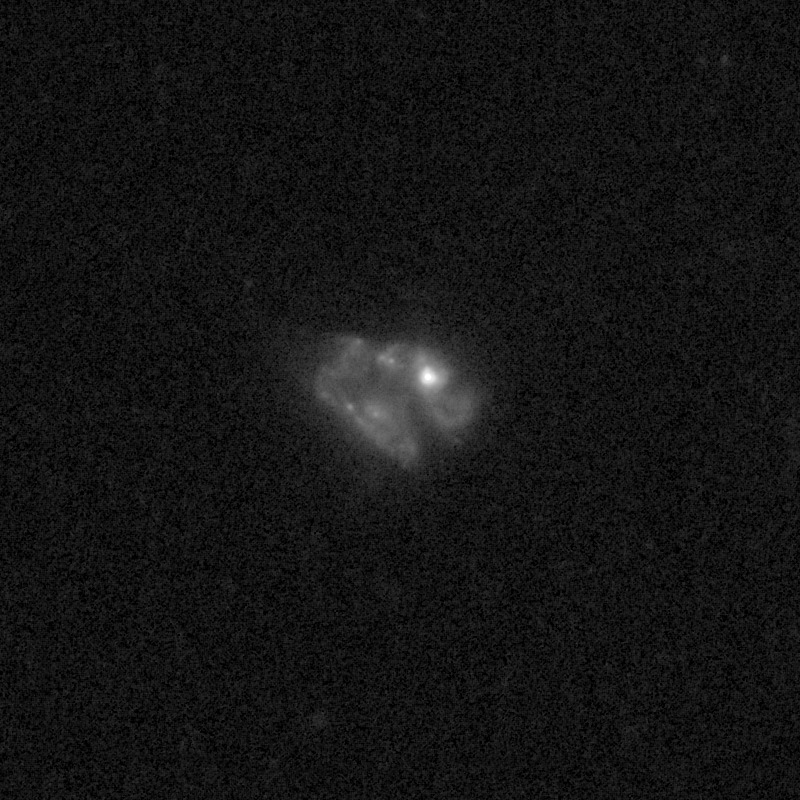

Outflows from merging galaxy J1558+3957

This NASA/ESA Hubble Space Telescope image of the galaxy J1558+3957 shows it is undergoing a firestorm of star birth, as shown by its bright white cores.

This star-making frenzy was ignited by mergers with other galaxies. The odd shape of the galaxy is telltale evidence of a close encounters.

The new Hubble Wide Field Camera 3 observations of this and eleven other galaxies undergoing the same process suggest that energy from the star-birthing frenzies created powerful winds that are blowing out the gas, meaning it is not available to form future generations of stars.

This activity occurred when the Universe was half its current age of 13.7 billion years. The gas-poor galaxies may eventually become so-called red and dead galaxies, composed only of aging stars.

This Hubble false-colour image was processed to bring out important details in the galaxy. The images were taken in 2010.

Credit: NASA, ESA, and P. Sell (Texas Tech University)